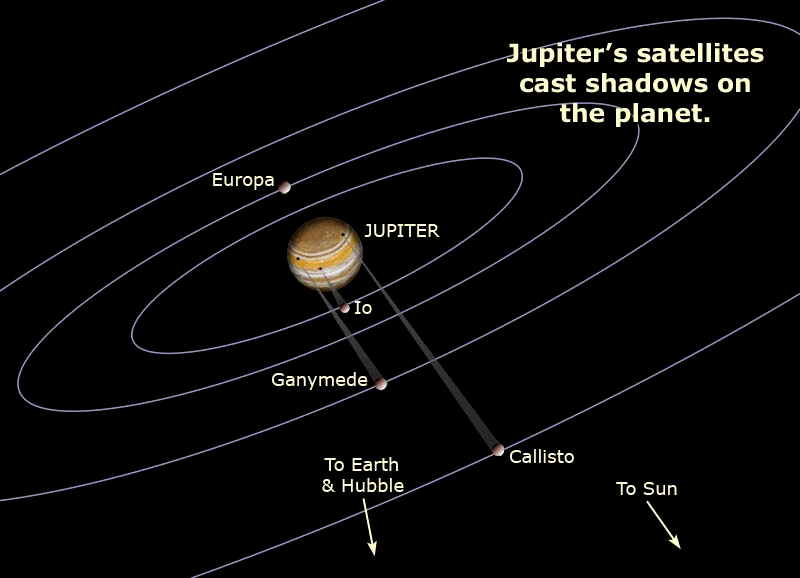

Shadows Cast by Satellites

This illustration plots the positions of Io, Europa, Ganymede, and Callisto on March 28, 2004, when the Hubble Space Telescope made the observations of the triple eclipse on Jupiter. The graphic shows the shadows cast on Jupiter by Io, Ganymede, and Callisto.

Credit: NASA, ESA, A. Feild and C. Klicka (STScI)